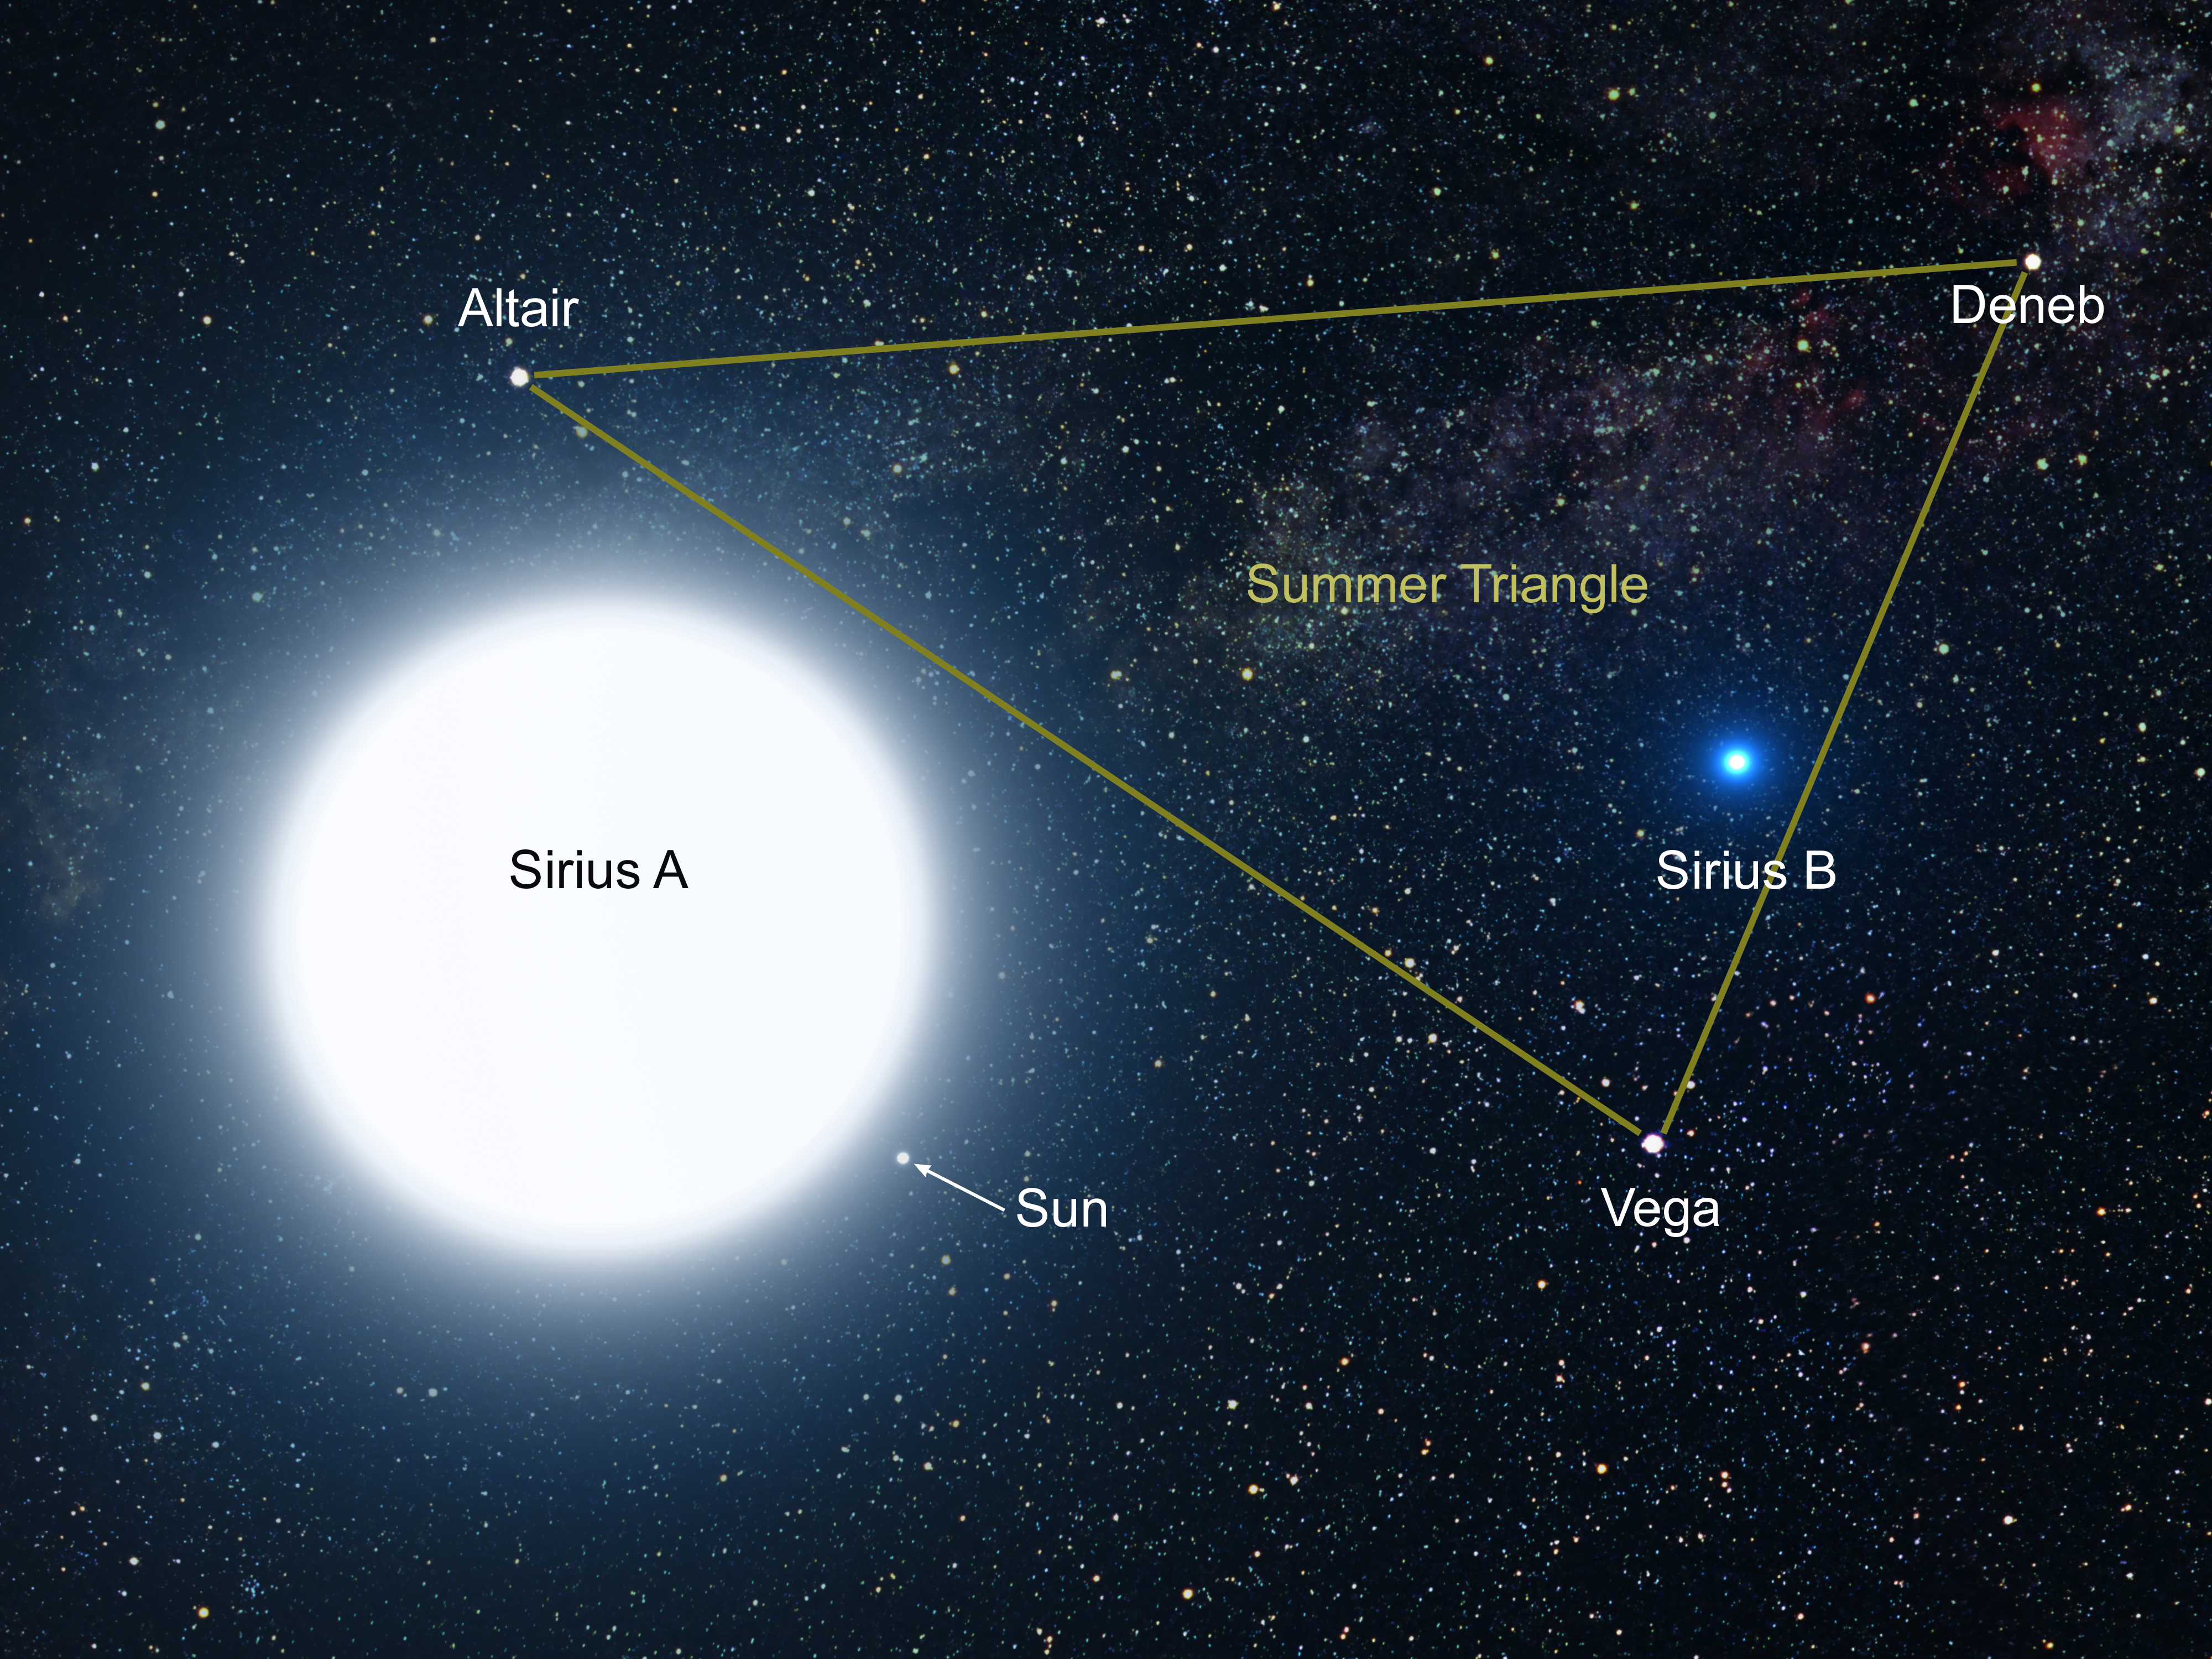

An artist's impression of Sirius A and B [annotated]

This picture is an artist's impression showing how the binary star system of Sirius A and its diminutive blue companion, Sirius B, might appear to an interstellar visitor. The large, bluish-white star Sirius A dominates the scene, while Sirius B is the small but very hot and blue white-dwarf star on the right. The two stars revolve around each other every 50 years. White dwarfs are the leftover remnants of stars similar to our Sun. The Sirius system, only 8.6 light-years from Earth, is the fifth closest stellar system known. Sirius B is faint because of its tiny size. Its diameter is only 7,500 miles (about 12 thousand kilometres), slightly smaller than the size of our Earth. The Sirius system is so close to Earth that most of the familiar constellations would have nearly the same appearance as in our own sky. In this rendition, we see in the background the three bright stars that make up the Summer Triangle: Altair, Deneb, and Vega. Altair is the white dot above Sirius A; Deneb is the dot to the upper right; and Vega lies below Sirius B. But there is one unfamiliar addition to the constellations: our own Sun is the second-magnitude star, shown as a small dot just below and to the right of Sirius A.

Credit: NASA, ESA and G. Bacon (STScI)